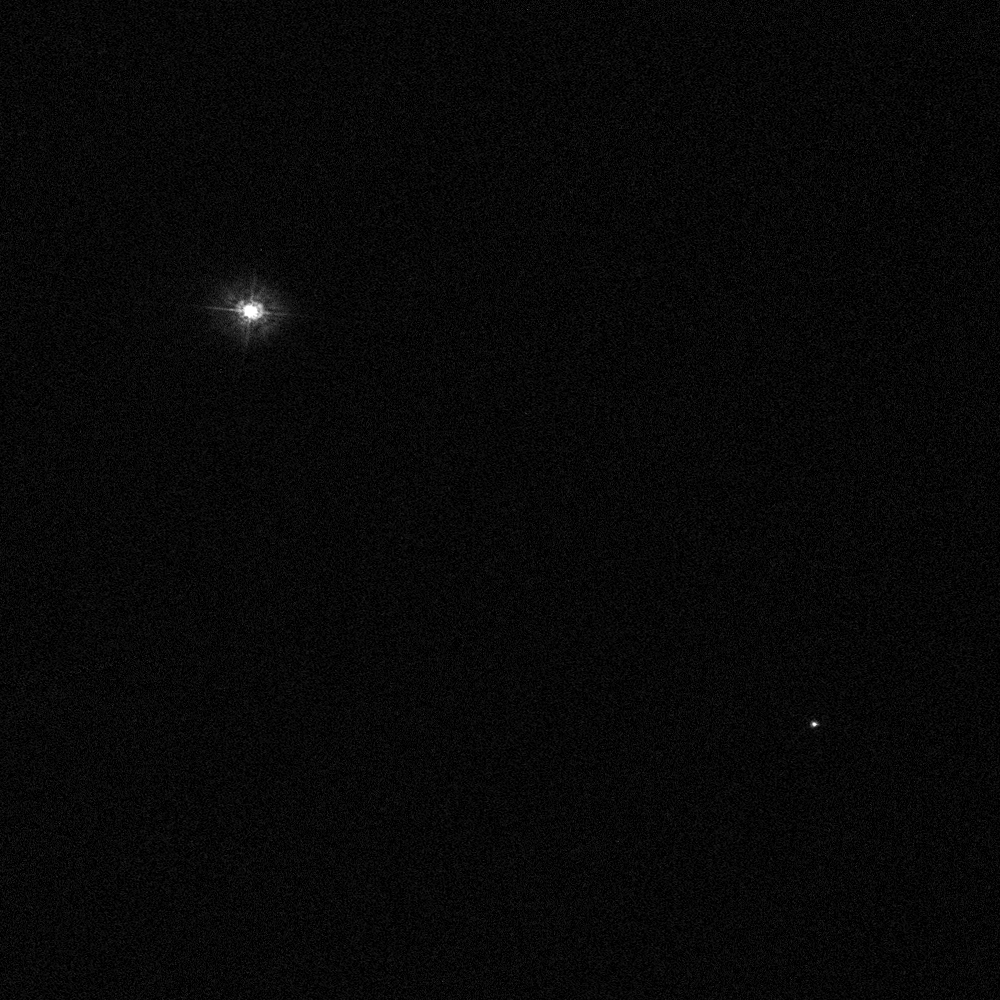

Polaris A and Polaris B

The North Star is actually a triple star system. Here we can see two of the stars, Polaris A and Polaris B.

Credit: NASA, ESA, N. Evans (Harvard-Smithsonian CfA), and H. Bond (STScI)